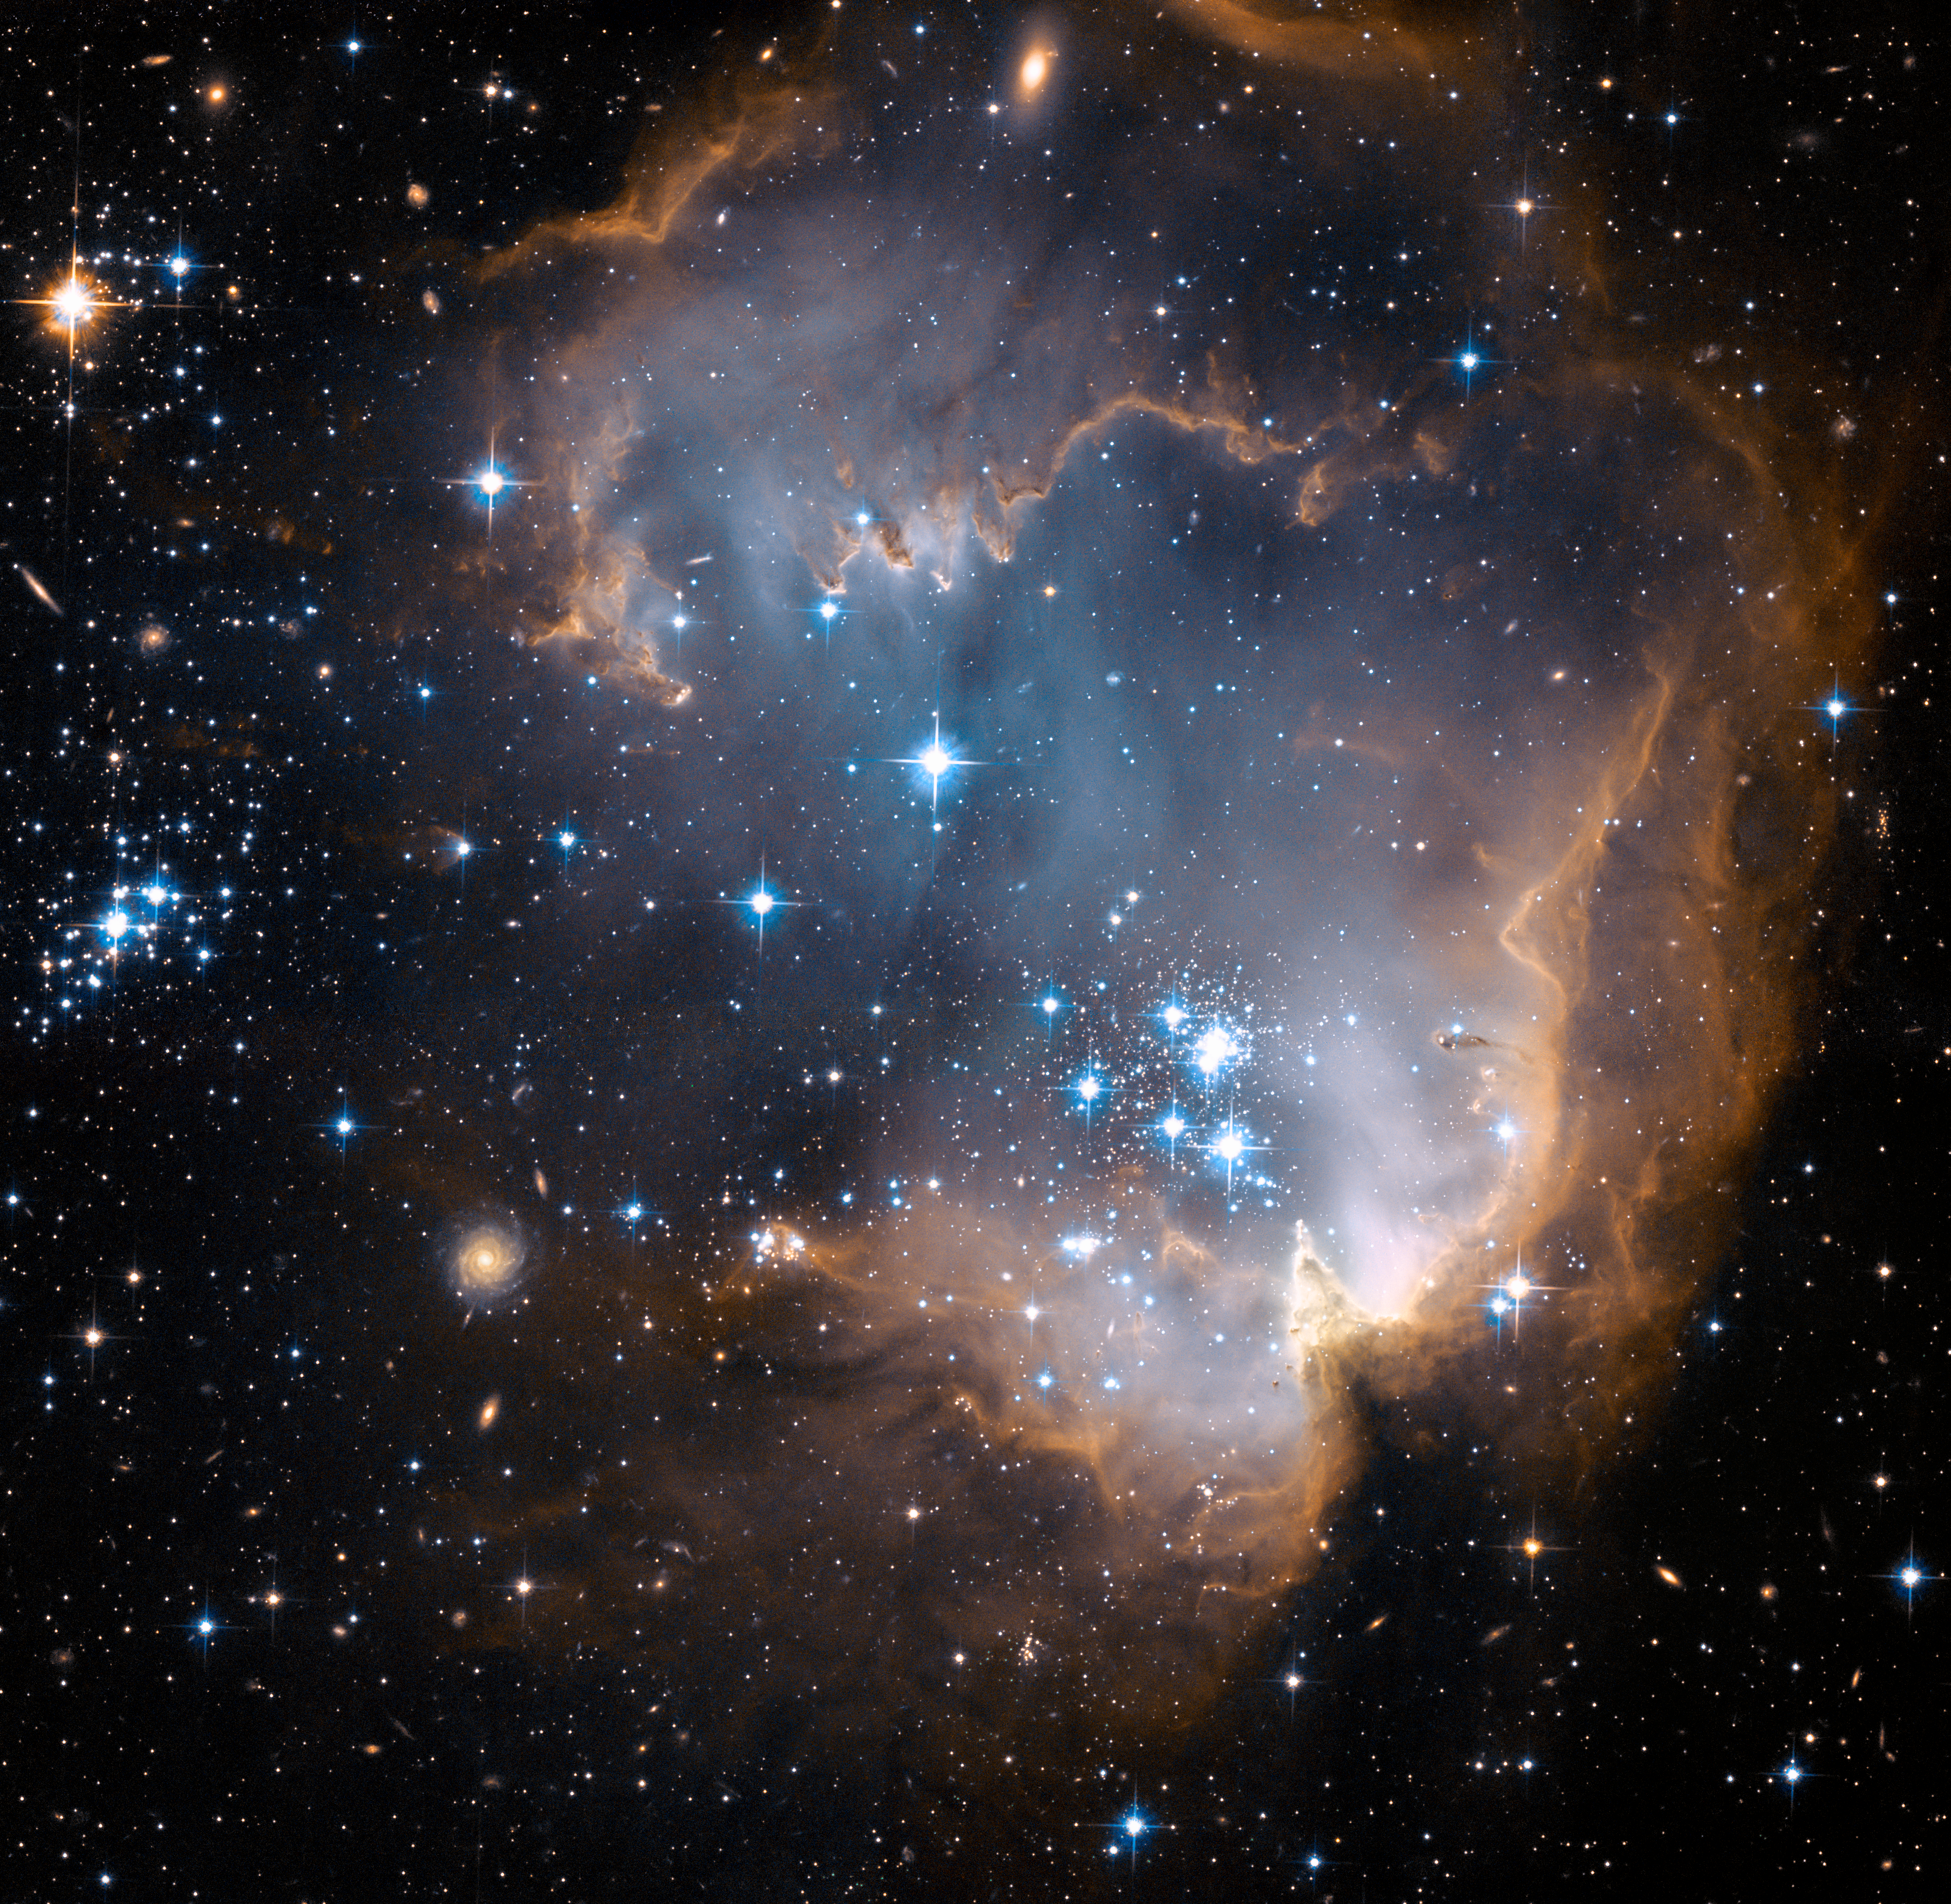

New stars shed light on the past

This image depicts bright blue newly formed stars that are blowing a cavity in the centre of a fascinating star-forming region known as N90.

The high energy radiation blazing out from the hot young stars in N90 is eroding the outer portions of the nebula from the inside, as the diffuse outer reaches of the nebula prevent the energetic outflows from streaming away from the cluster directly. Because N90 is located far from the central body of the Small Magellanic Cloud, numerous background galaxies in this picture can be seen, delivering a grand backdrop for the stellar newcomers. The dust in the region gives these distant galaxies a reddish-brown tint.

Credit: NASA, ESA and the Hubble Heritage Team (STScI/AURA)-ESA/Hubble Collaboration